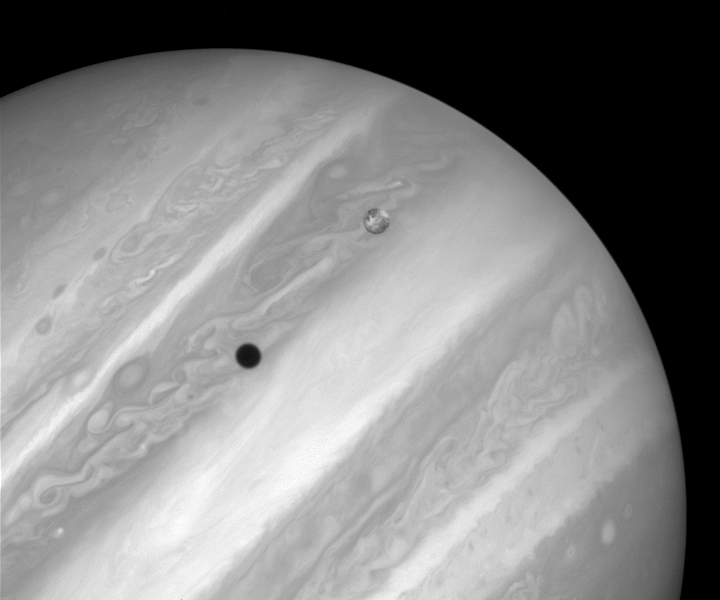

Rare Hubble Portrait of Io and Jupiter

This image, shows Jupiter's volcanic moon Io passing above the turbulent clouds of the giant planet, on July 24, 1996. The conspicuous black spot on Jupiter is Io's shadow.

The smallest details visible on Io and Jupiter are about 100 miles across (about 160 kilometres). Bright patches visible on Io are regions of sulfur dioxide frost.

Credit: J. Spencer (Lowell Observatory), and NASA/ESA